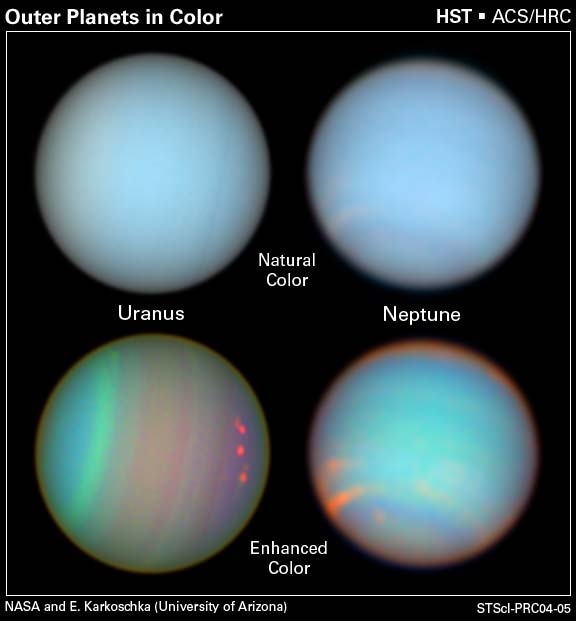

The Colorful Lives of the Outer Planets

Atmospheric features on Uranus and Neptune are revealed in images taken with the Space Telescope Imaging Spectrograph and the Advanced Camera for Surveys aboard NASA/ESA Hubble Space Telescope. The observations were taken in August 2003.

The top row reveals Uranus and Neptune in natural colors, showing the planets as they would appear if we could see them through a telescope. The images are made of exposures taken with filters sensitive to red, green, and blue light. In the bottom images, astronomers used different colour filters to detect features we can't see. The photographs demonstrate that, by using certain types of colour filters, astronomers can extract more information about a celestial object than our eyes normally can see.

Credit: NASA/ESA and Erich Karkoschka, University of Arizona